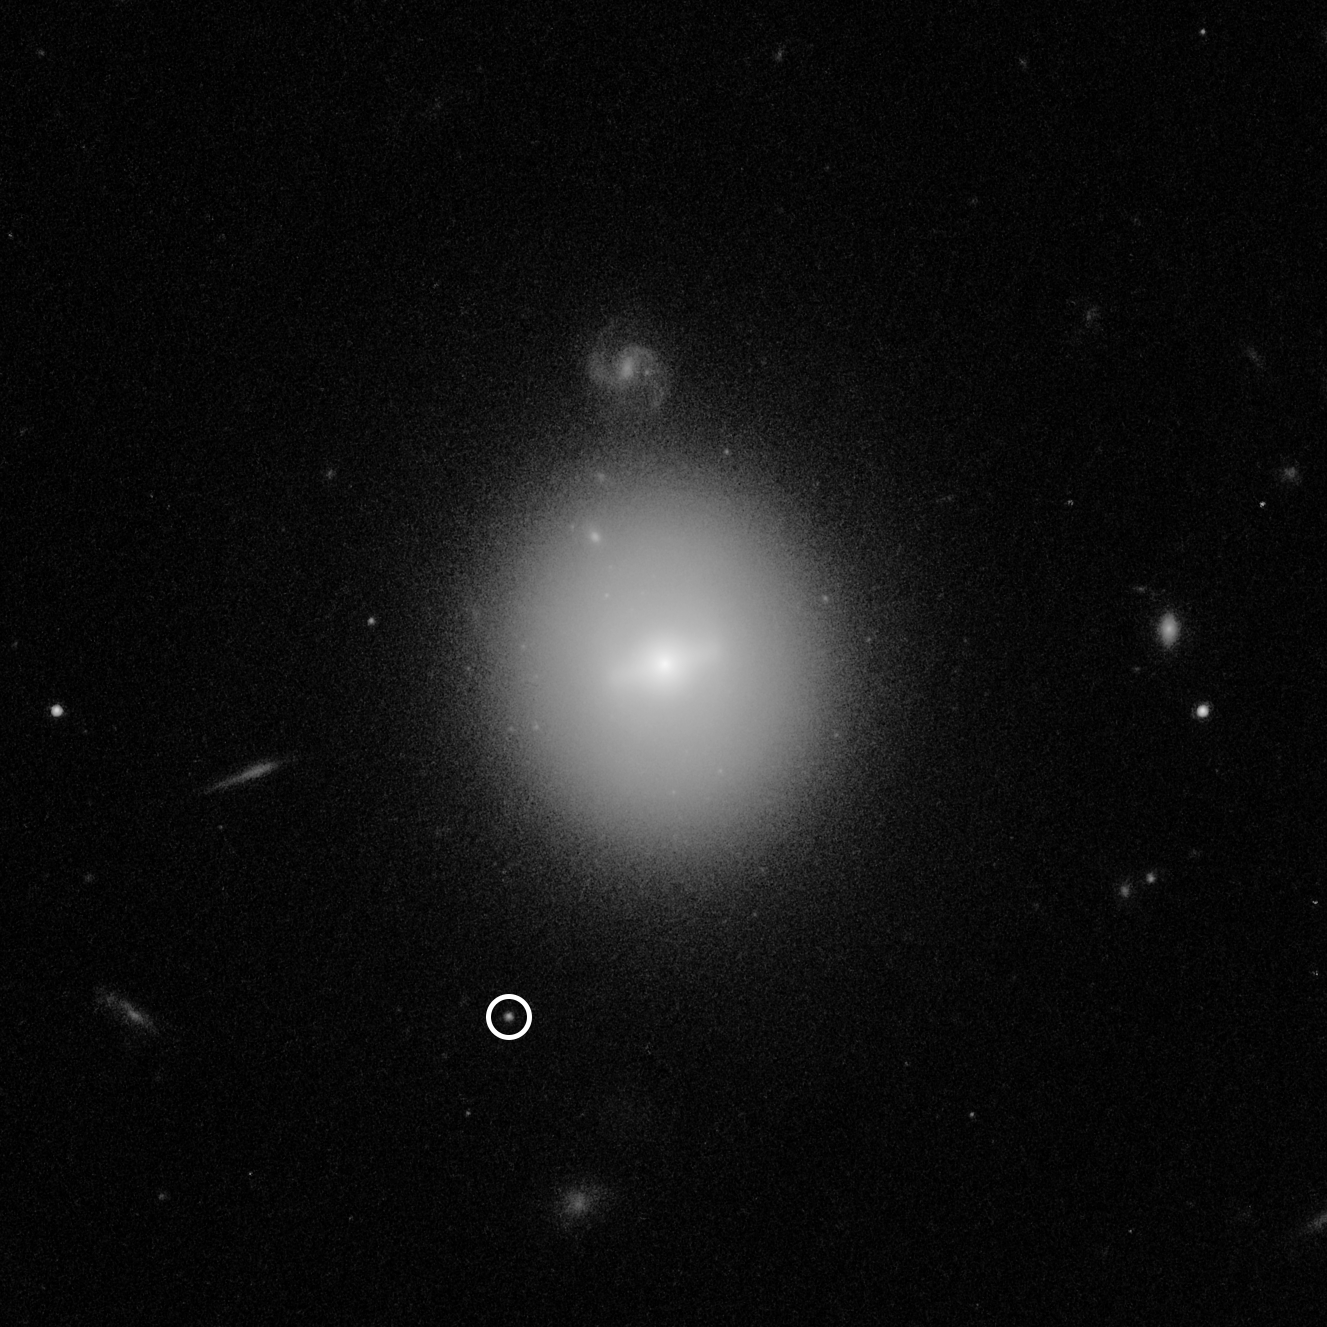

Hubble Observation of Intermediate-Mass Black Hole

This Hubble Space Telescope image identified the location of an intermediate-mass black hole (IMBH), weighing over 50 000 times the mass of our Sun (making it much smaller than the supermassive black holes found in the centres of galaxies). The black hole, named 3XMM J215022.4−055108, is indicated by the white circle. This elusive type of black hole was first identified via a telltale burst of X-rays emitted by hot gas from a star as it was captured and destroyed by the black hole. Hubble was needed to pinpoint the black hole’s location in visible light. Hubble’s deep, high-resolution imaging shows that the black hole resides inside a dense cluster of stars that is far beyond our Milky Way galaxy. The star cluster is in the vicinity of the galaxy at the centre of the image. Much smaller images of distant background galaxies appear sprinkled around the image, including a face-on spiral just above the central foreground galaxy. This photo was taken with Hubble’s Advanced Camera for Surveys.

Credit: NASA, ESA, and D. Lin (University of New Hampshire)